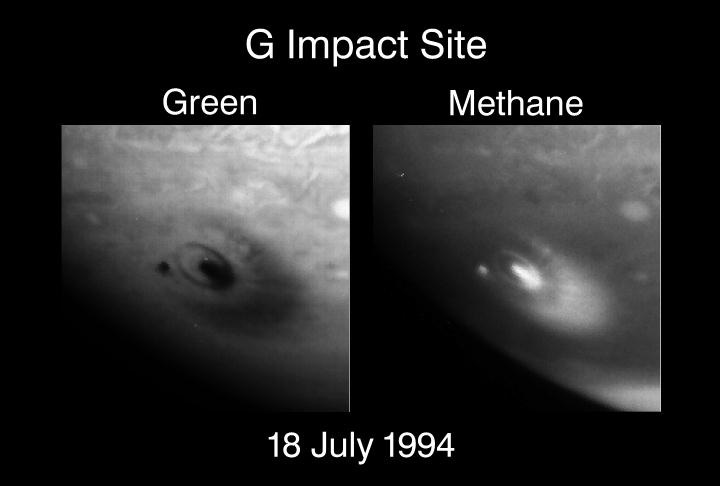

G impact site

These images of Jupiter, by NASA/ESA Hubble Space Telescope, reveal the impact sites of fragments 'D' and 'G' from Comet Shoemaker-Levy 9. The upper right corners of each image points north, showing the impact sites located in Jupiter's southern hemisphere at a latitude of 44 degrees.

Credit: H. Hammel, MIT and NASA/ESA